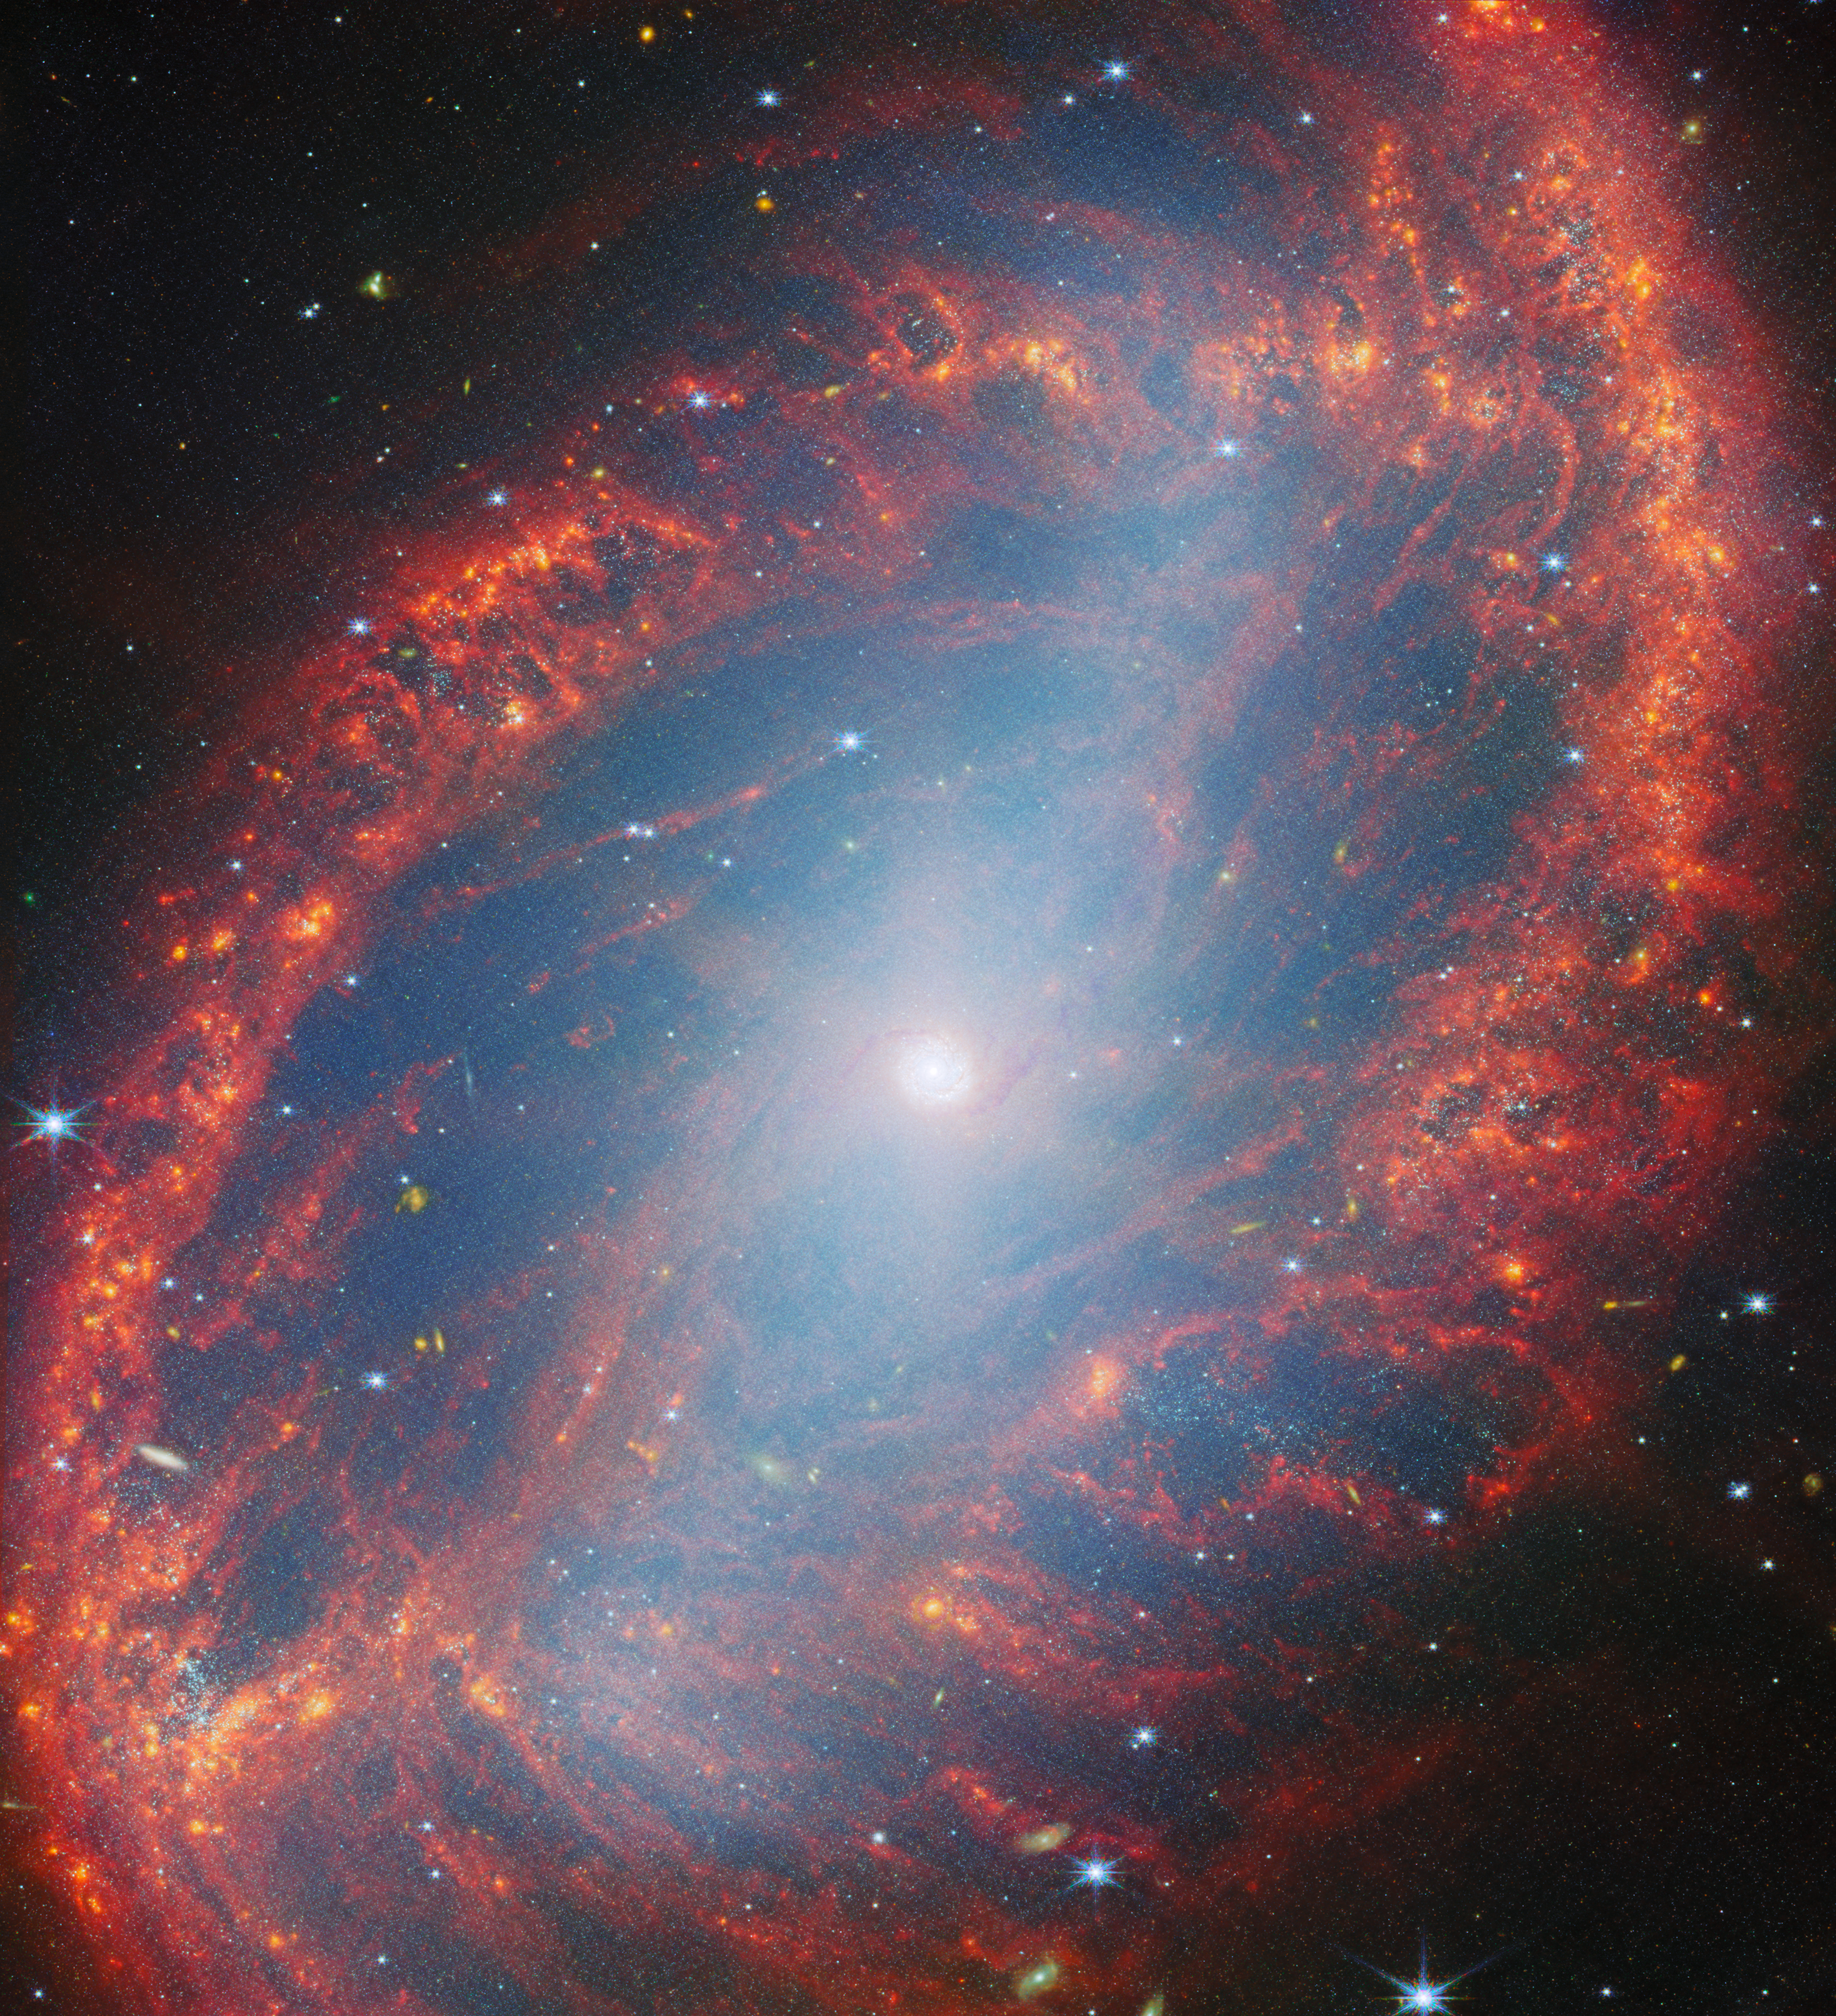

Close look at a local galaxy

The galaxy filling the frame in this NASA/ESA/CSA James Webb Space Telescope Picture of the Month is NGC 2566, a spiral galaxy located in the constellation Puppis. The image combines observations from two of Webb’s instruments, the Near-InfraRed Camera (NIRCam) and Mid-InfraRed Instrument (MIRI), to show off NGC 2566’s well-defined spiral arms, long central bar and delicate tracery of gas, dust and stars.

At 76 million light-years away, NGC 2566 is considered a nearby galaxy, making it an excellent target for studying fine details like star clusters and gas clouds. The new Webb images of NGC 2566 were collected as part of an observing programme (#3707) dedicated to understanding the connections between stars, gas and dust in nearby star-forming galaxies. NGC 2566 is just one of the 55 galaxies in the local Universe examined by Webb for this programme.

The mid-infrared wavelengths captured by MIRI highlight NGC 2566’s warm interstellar dust, including complex, sooty molecules called polycyclic aromatic hydrocarbons. The near-infrared NIRCam data give a detailed view of the galaxy’s stars, even those that are deeply embedded within clouds of gas. The NIRCam data also capture some of the light from the hydrocarbon molecules.

To gain a full understanding of the star-formation process in nearby galaxies, astronomers will combine Webb data with observations from other telescopes. At the long-wavelength end of the electromagnetic spectrum, the 66 radio dishes of the Atacama Large Millimeter/submillimeter Array (ALMA) provide a detailed view of the cold, turbulent clouds where stars are born. The NASA/ESA Hubble Space Telescope has also cast its gaze on NGC 2566, and a new Hubble image of this galaxy was released earlier this week. The Hubble data will help researchers take a census of the stars in nearby galaxies, especially the young stars that are bright at the ultraviolet and visible wavelengths to which Hubble is sensitive. Together, the Webb, Hubble and ALMA data provide a rich view of the cold gas, warm dust and brilliant stars in NGC 2566.

The Webb data are part of a Treasury programme, which means that the data may help answer multiple important questions about our Universe. Treasury data are available for use by scientists and the public without a waiting period, amplifying the scientific impact and allowing exploration to begin immediately.

Credit: ESA/Webb, NASA & CSA, A. Leroy